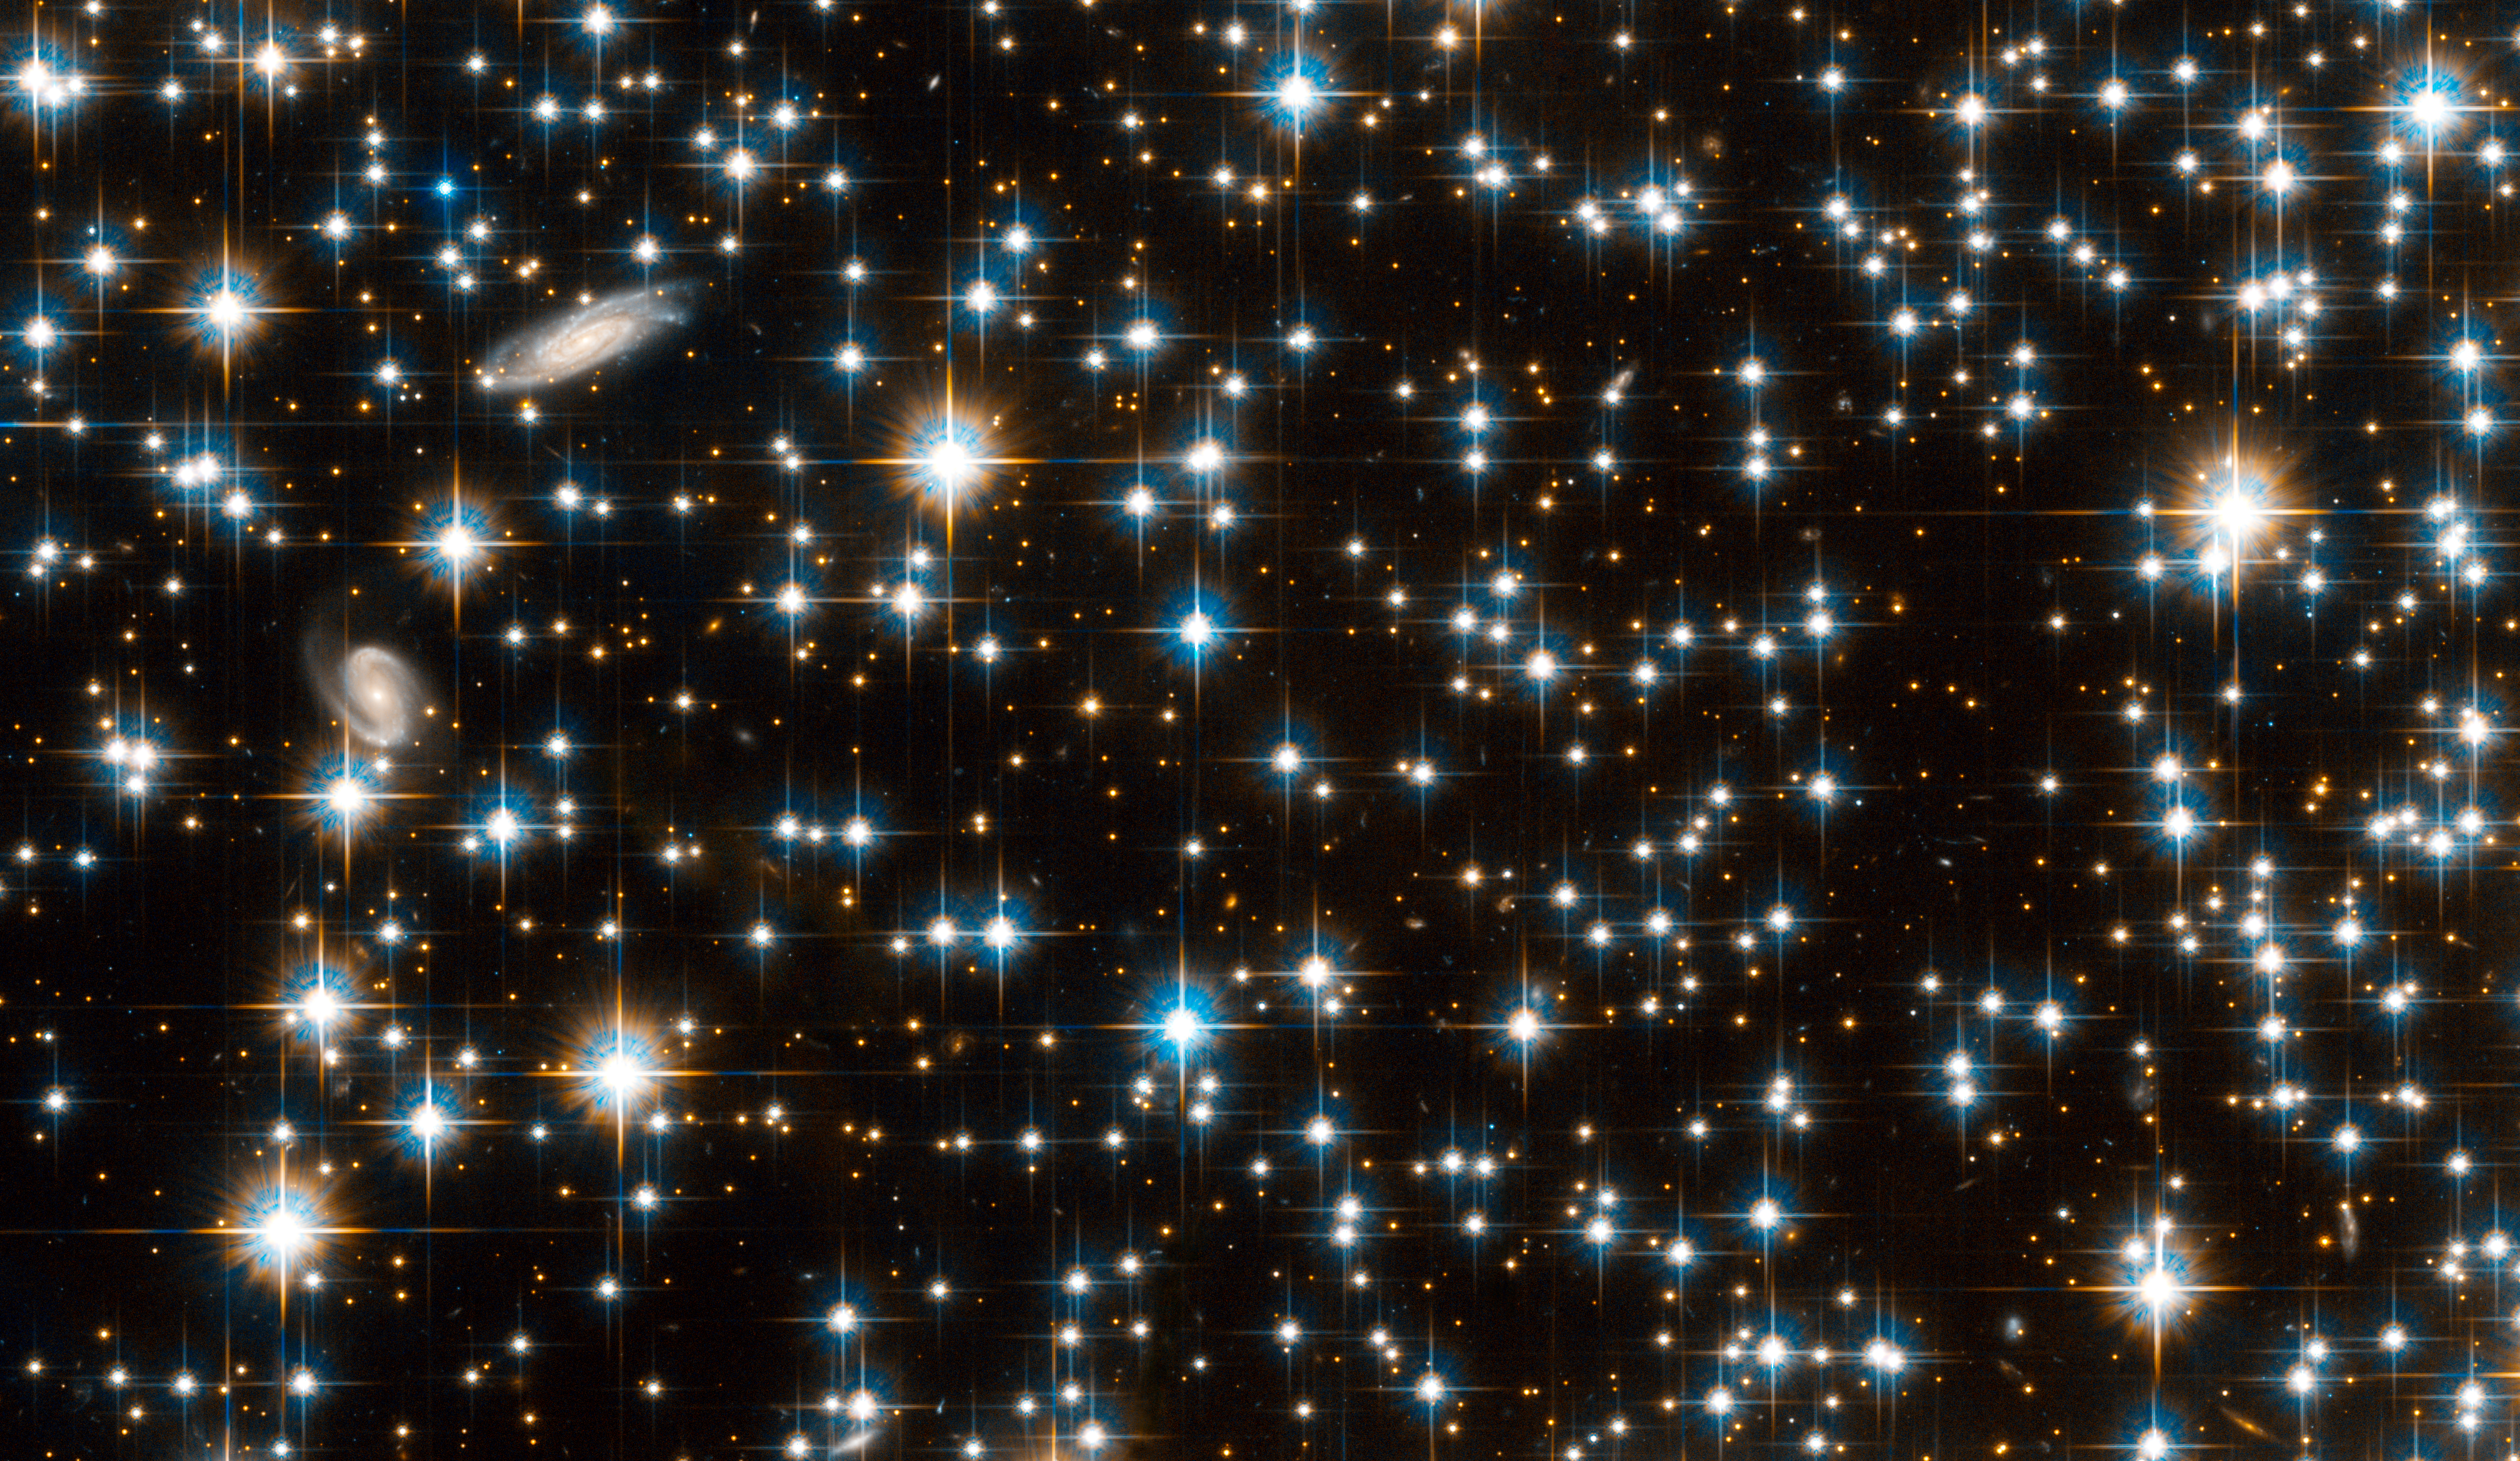

NGC 6791: full Hubble ACS field

The full Hubble Advanced Camera for Surveys field is full of stars estimated to be 8 billion years old. Two background galaxies can be seen at upper left.

Credit: NASA, ESA, and L. Bedin (STScI)